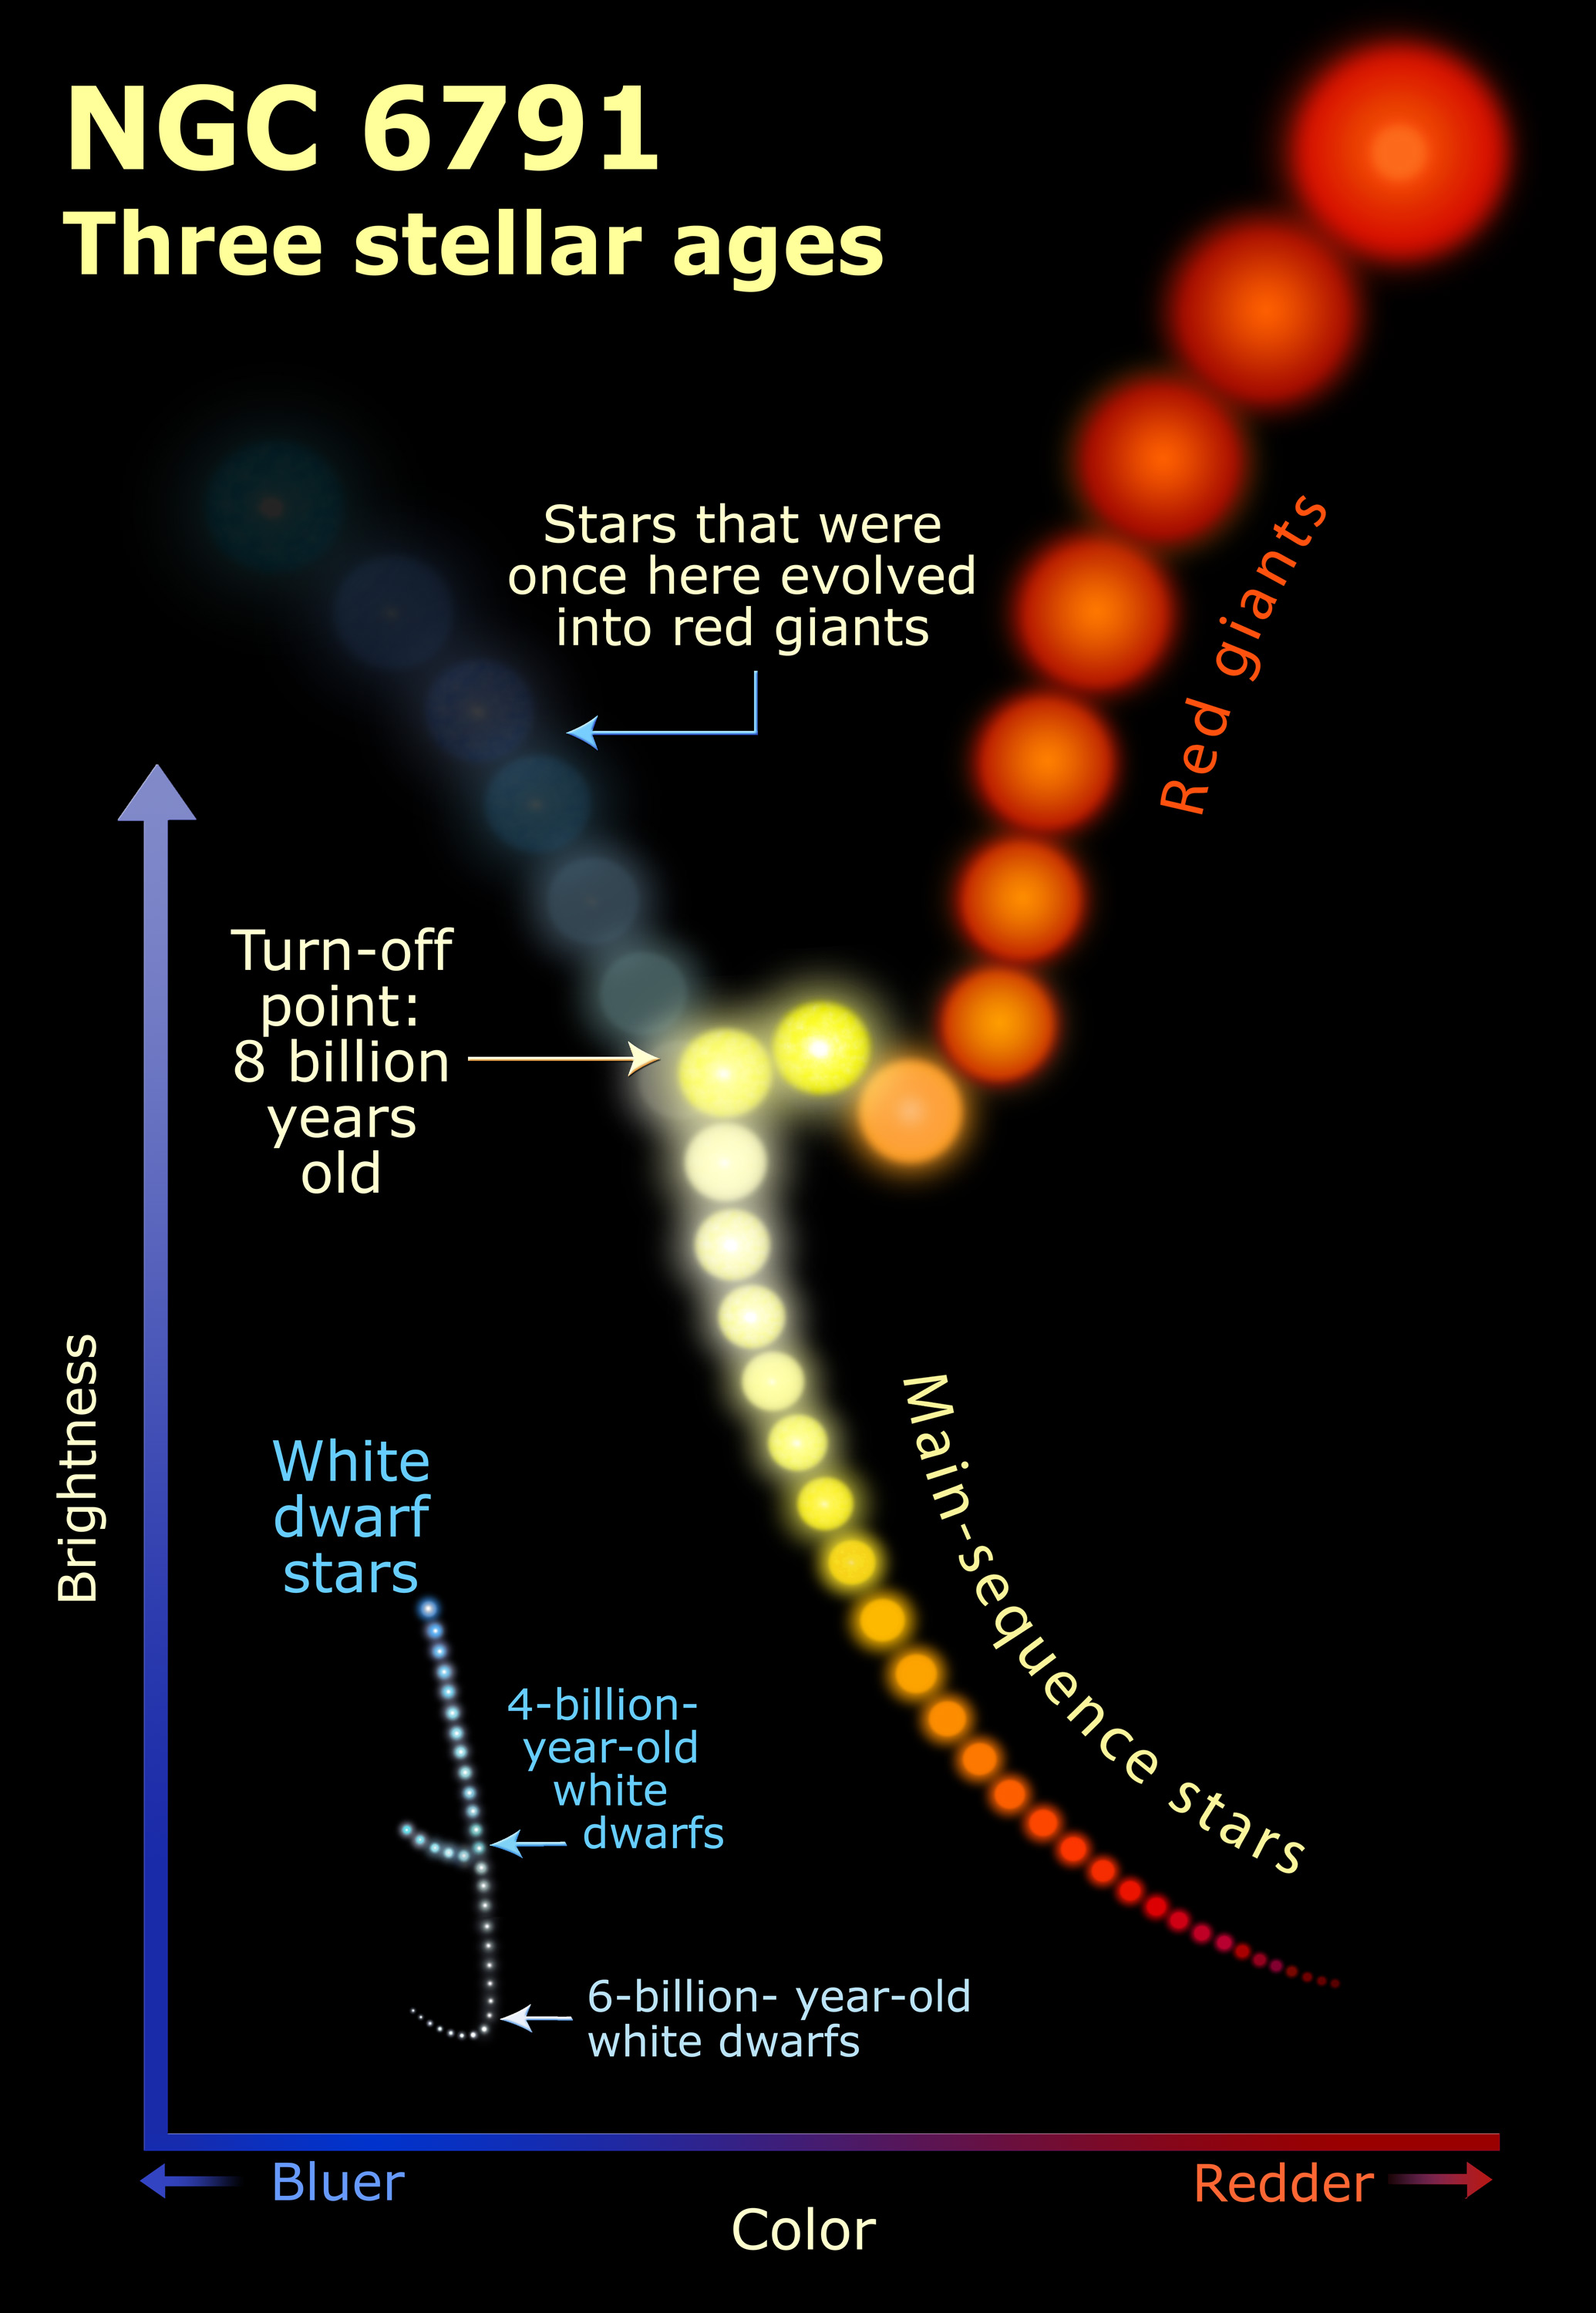

NGC 6791: three stellar ages illustration

This illustration explains the three stellar ages of NGC 6791.

Credit: NASA, ESA, and A. Feild (STScI)